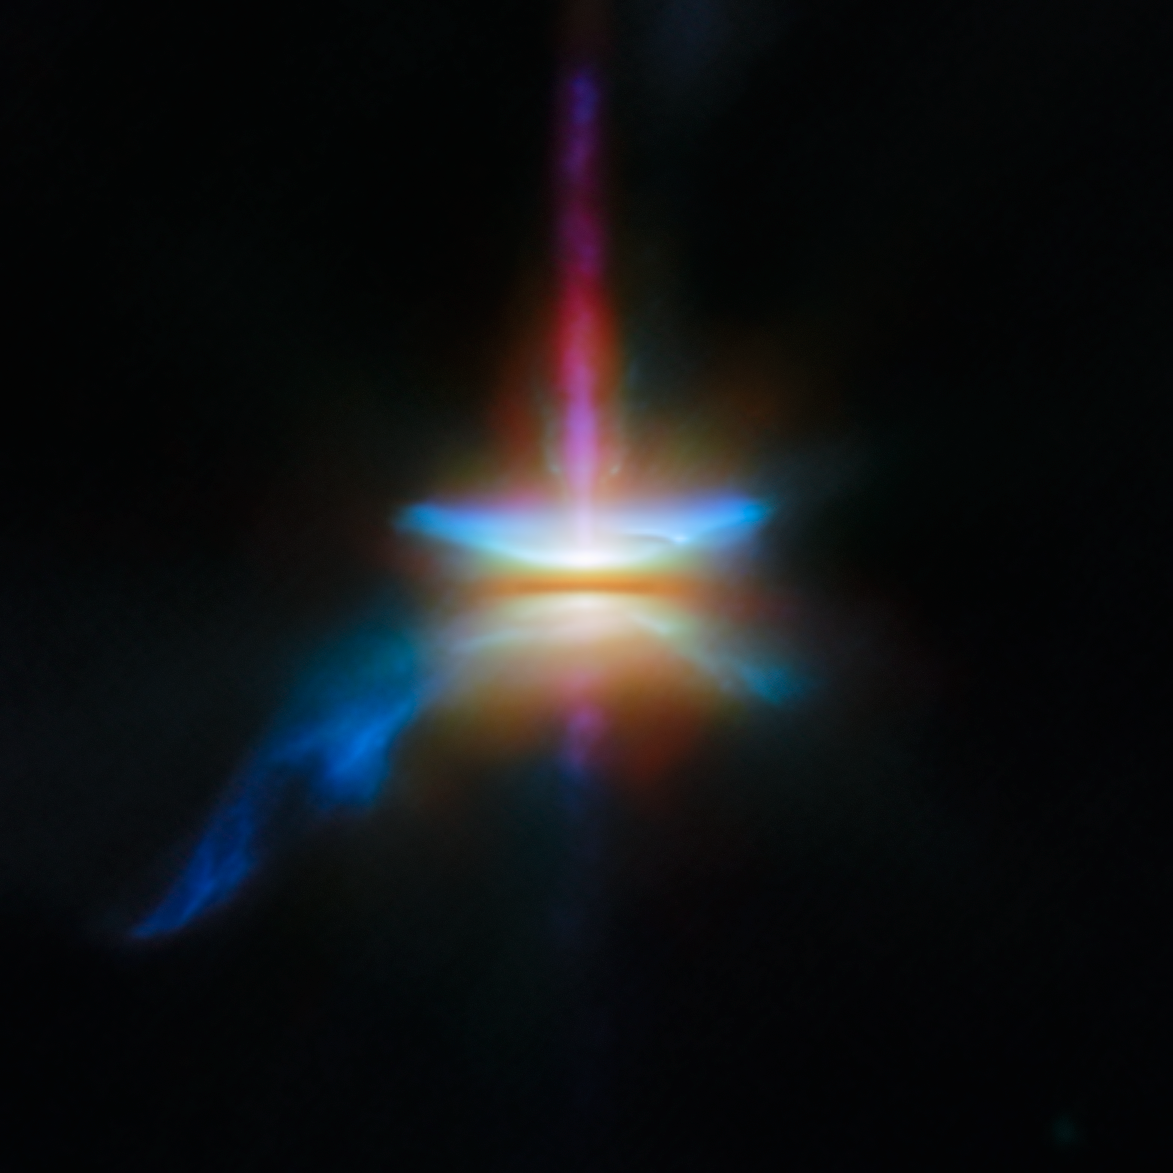

Webb investigates a dusty and dynamic disc

This new NASA/ESA/CSA James Webb Space Telescope Picture of the Month presents HH 30 in unprecedented resolution. This target is an edge-on protoplanetary disc that is surrounded by jets and a disc wind, and is located in the dark cloud LDN 1551 in the Taurus Molecular Cloud.

Herbig-Haro objects are small nebulae found in star formation regions, marking the locations where gas outflowing from young stars is heated into luminescence by shockwaves. HH 30 is an example of where this outflowing gas takes the form of a narrow jet. The source star is located on one end of the jet, hidden behind an edge-on protoplanetary disc that the star is illuminating.

HH 30 is of particular interest to astronomers. In fact, the HH 30 disc is considered the prototype of an edge-on disc, thanks to its early discovery with the NASA/ESA Hubble Space Telescope. Discs seen from this view are a unique laboratory to study the settling and drift of dust grains.

An international team of astronomers have used Webb to investigate the target in unprecedented detail. By combining Webb’s observations with those from the Hubble Space Telescope and the Atacama Large Millimeter/submillimeter Array (ALMA), the team was able to study the multiwavelength disc appearance of the system.

The long-wavelength data from ALMA trace the location of millimetre-sized dust grains, which are found in a narrow region in the central plane of the disc. The shorter-wavelength infrared data from Webb reveal the distribution of smaller dust grains. These grains are only one millionth of a metre across — about the size of a single bacterium. While the large dust grains are concentrated in the densest parts of the disc, the small grains are much more widespread.

These Webb observations were taken as part of the Webb GO programme #2562 (PI F. Ménard, K. Stapelfeldt), which aims to understand how dust evolves in edge-on discs like HH 30. Combined with the keen radio-wavelength eyes of ALMA, these observations show that large dust grains must migrate within the disc and settle in a thin layer. The creation of a narrow, dense layer of dust is an important stage in the process of planet formation. In this dense region, dust grains clump together to form pebbles and eventually planets themselves.

In addition to the behaviour of dust grains, the Webb, Hubble, and ALMA images reveal several distinct structures that are nested within one another. Emerging at a 90-degree angle from the narrow central disc is a high-velocity jet of gas. The narrow jet is surrounded by a wider, cone-shaped outflow. Enclosing the conical outflow is a wide nebula that reflects the light from the young star that is embedded within the disc. Together, these data reveal HH 30 to be a dynamic place, where tiny dust grains and massive jets alike play a role in the formation of new planets.

The annotated verision of this image can be seen here.

Credit: ESA/Webb, NASA & CSA, Tazaki et al.